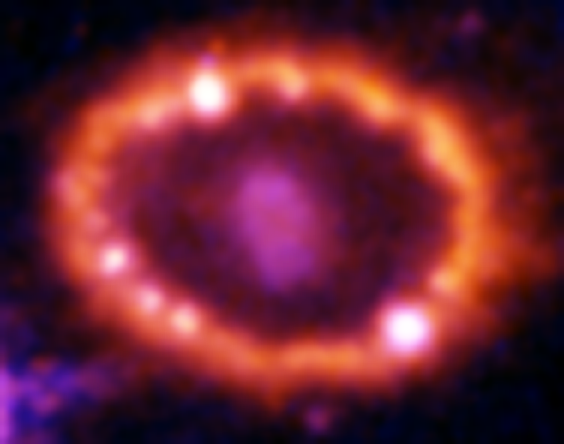

Hubble Supernova 1987A Scrapbook (1994-2003) - Image 9

in 1987, astronomers spotted the brightest stellar explosion ever seen since the one observed by Johannes Kepler over 400 years ago. Called SN 1987A, the titanic supernova explosion blazed with the power of 100,000,000 suns for several months following its discovery on Feb. 23 of that year. Although the supernova itself is over a million times fainter than when it was first discovered, a new light show in the space surrounding it is just beginning.

Credit: NASA/ESA, P. Challis, R. Kirshner (Harvard-Smithsonian Center for Astrophysics) and B. Sugerman (STScI)